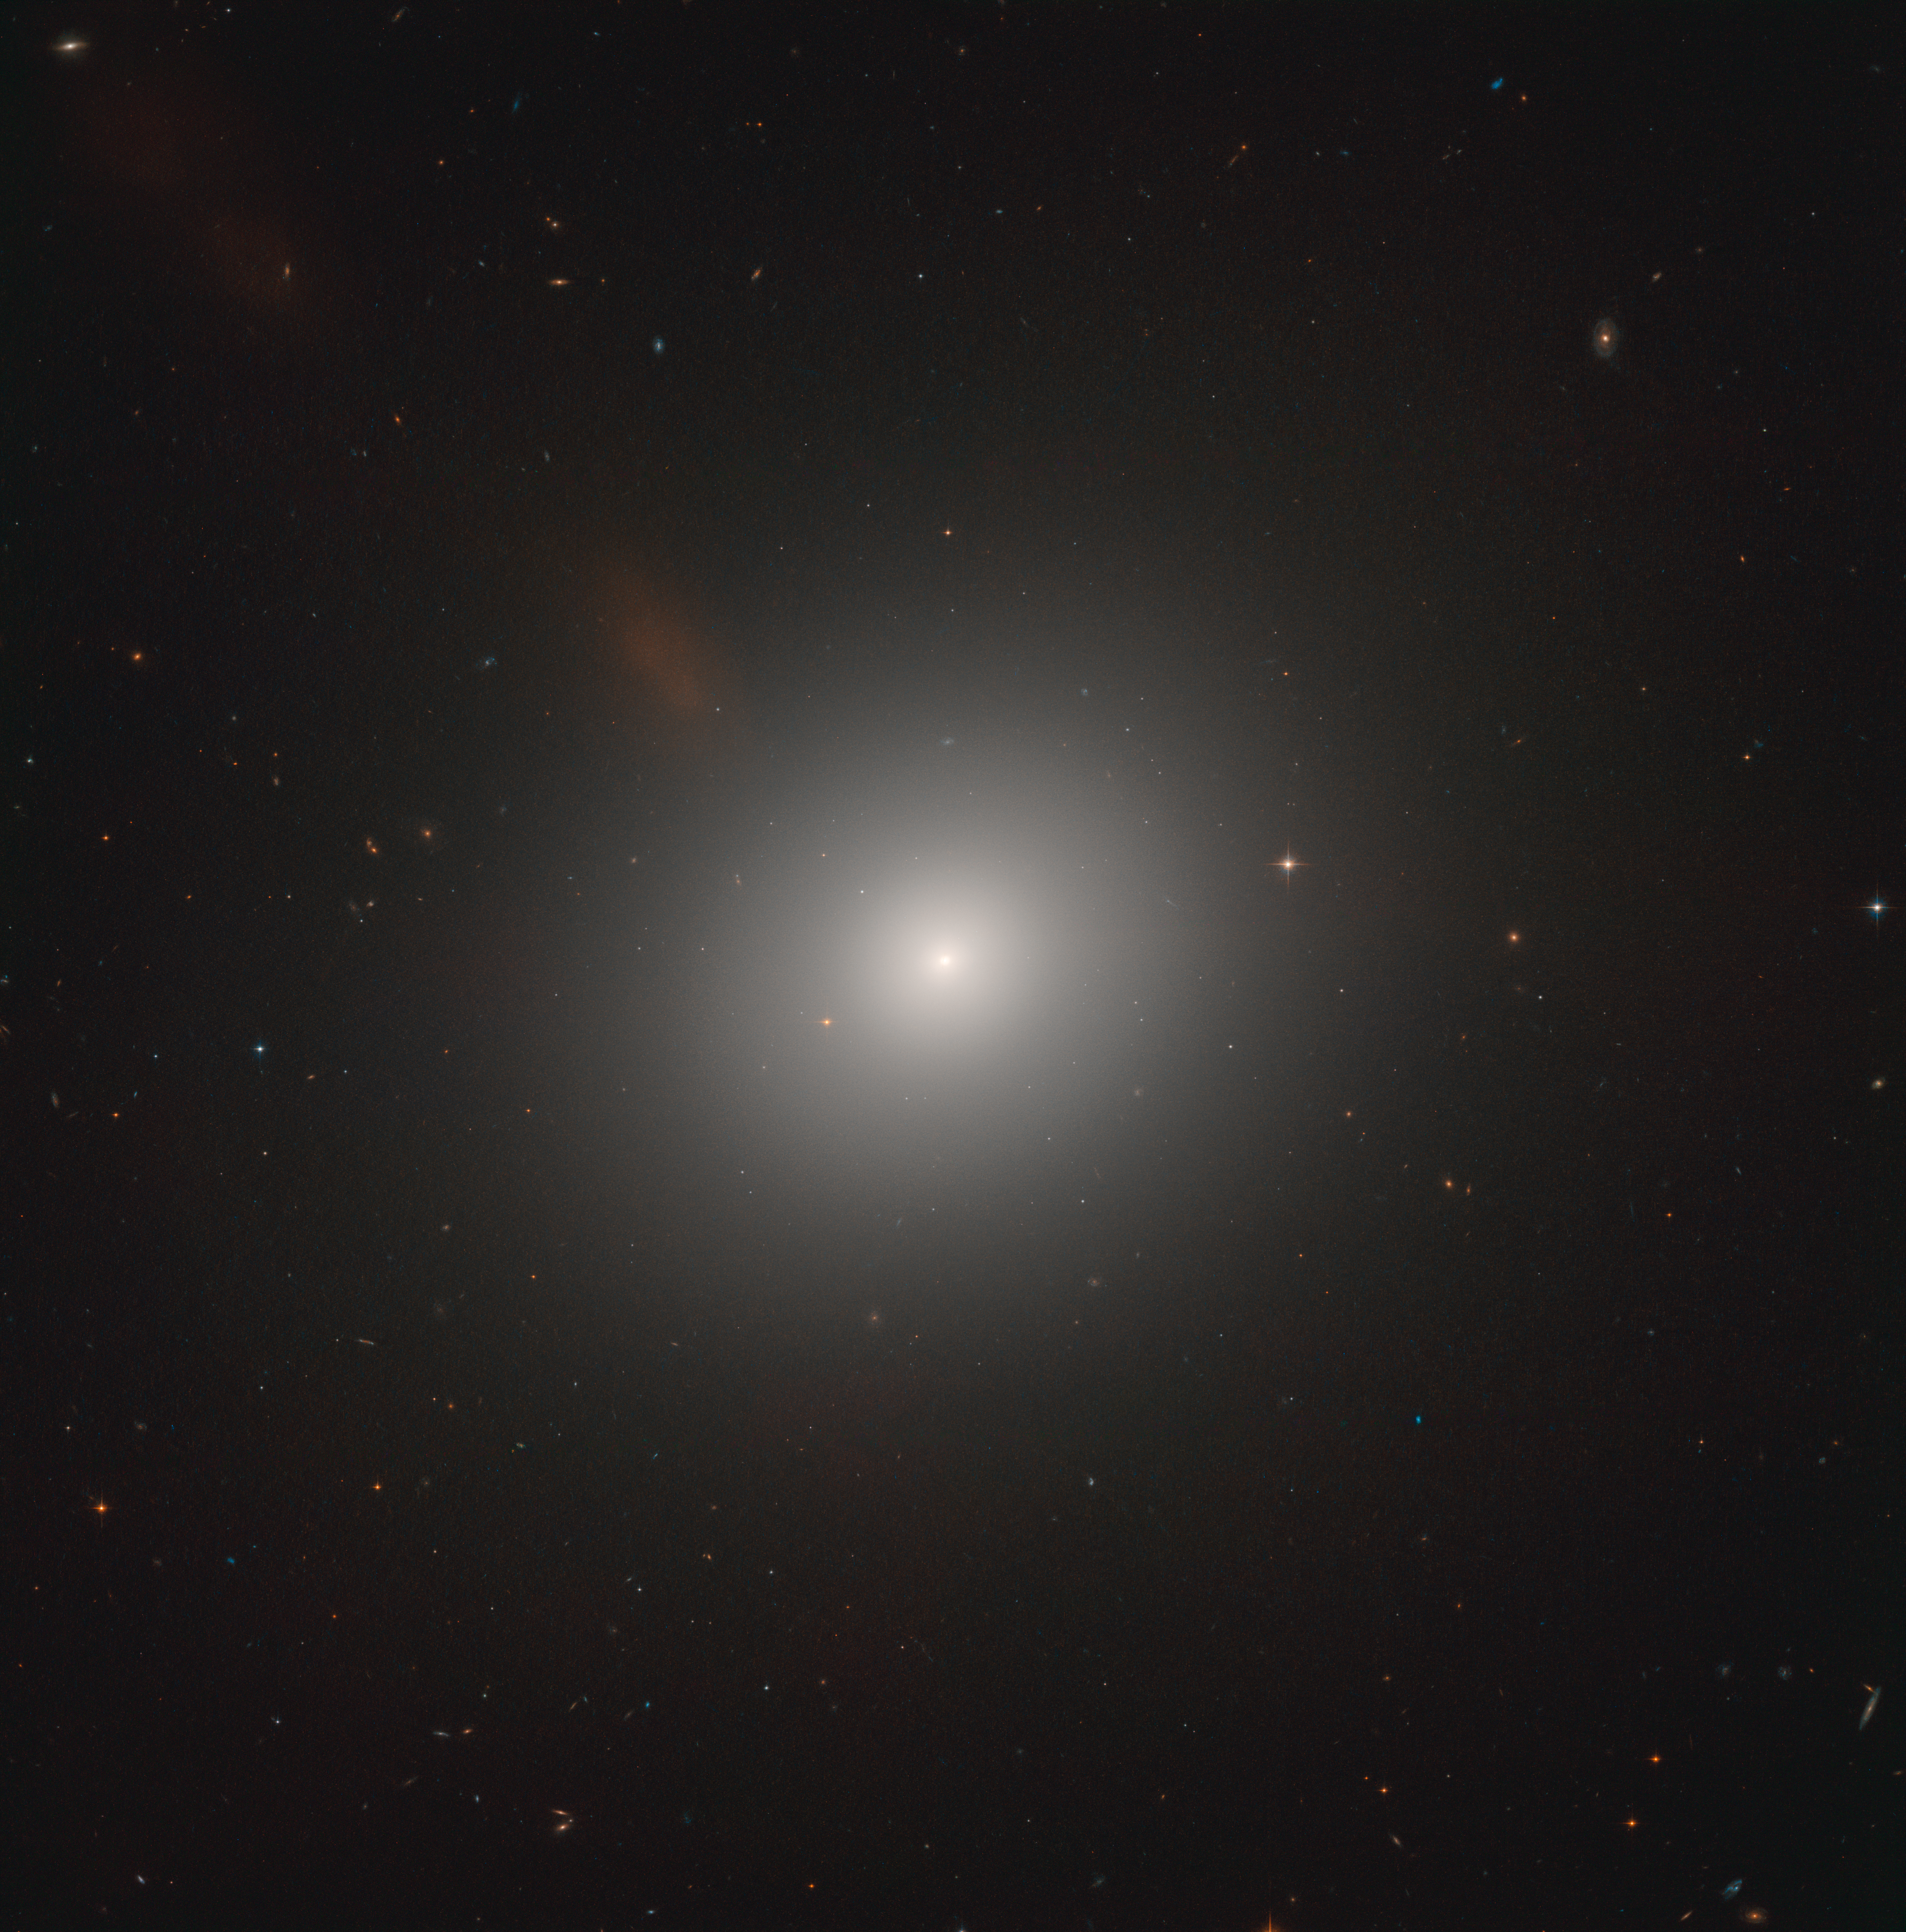

The heart of the Lion

It might appear featureless and unexciting at first glance, but NASA/ESA Hubble Space Telescope observations of this elliptical galaxy — known as Messier 105 — show that the stars near the galaxy’s centre are moving very rapidly. Astronomers have concluded that these stars are zooming around a supermassive black hole with an estimated mass of 200 million Suns! This black hole releases huge amounts of energy as it consumes matter falling into it and causing the centre to shine far brighter than its surroundings. This system is known as an active galactic nucleus.

Hubble also surprised astronomers by revealing a few young stars and clusters in Messer 105, which was thought to be a “dead” galaxy incapable of star formation. Messier 105 is now thought to form roughly one Sun-like star every 10 000 years. Star-forming activity has also been spotted in a vast ring of hydrogen gas encircling both Messier 105 and its closest neighbour, the lenticular galaxy NGC 3384.

Messier 105 was discovered in 1781, lies about 30 million light-years away in the constellation of Leo (The Lion), and is the brightest elliptical galaxy within the Leo I galaxy group.

Credit: ESA/Hubble & NASA, C. Sarazin et al.